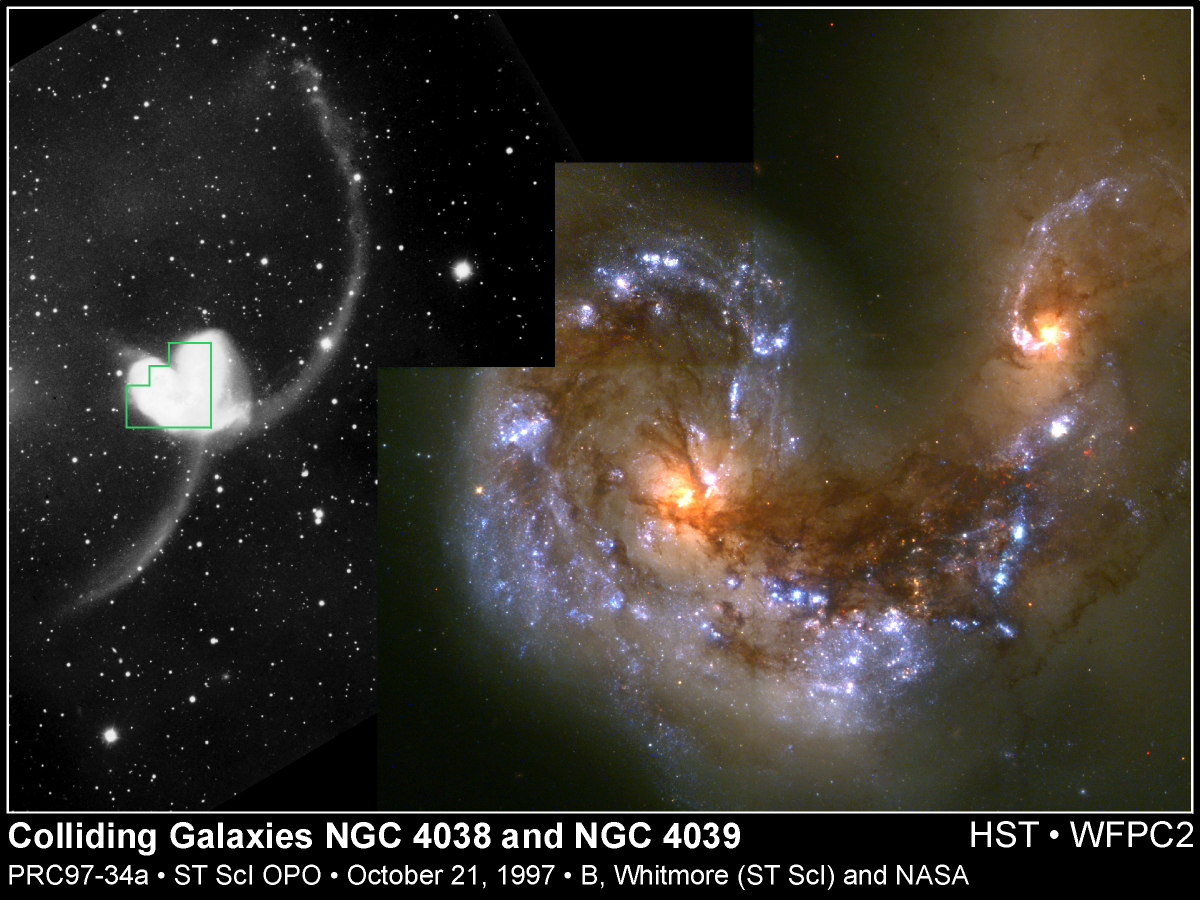

Colliding Galaxies NGC 4038 and NGC 4039

This Hubble Space Telescope image provides a detailed look at a brilliant 'fireworks show' at the center of a collision between two galaxies. Hubble has uncovered over 1, 000 bright, young star clusters bursting to life as a result of the head-on wreck.

Credit: Brad Whitmore (STScI), and NASA/ESA